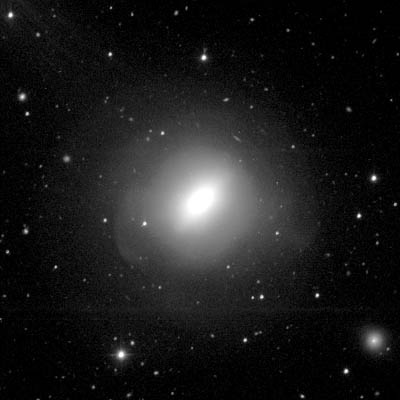

NGC 3610

NGC 3610 is an ellliptical galaxy in the constellation Ursa Major. Tha galaxy is at a distance of about 80 million light years and was discovered in 1793 by William Herschel.

In 1990 a group of german astronomers detected a disk in NGC 3610. This was a surprising discovery as disks are normaly a distinguish feature of spiral galaxies.

Credit: Francois Schweizer (CIW/DTM)